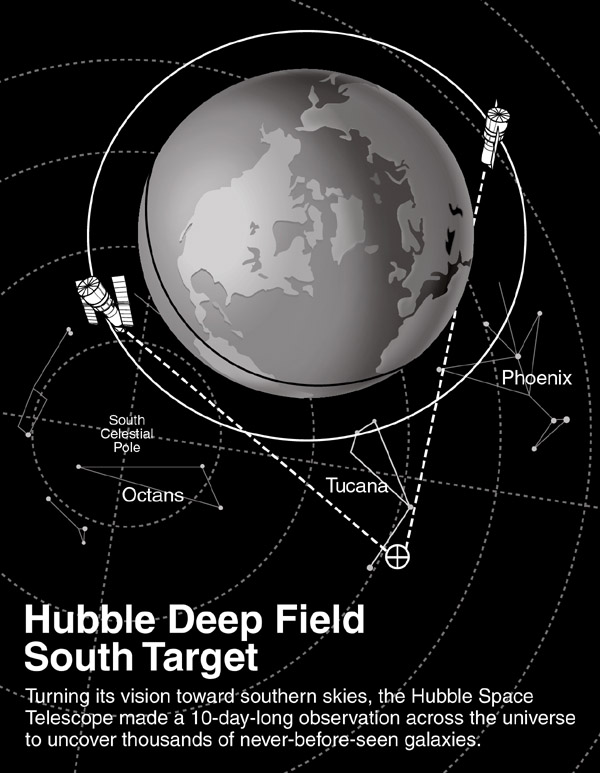

Hubble deep field south target

Turning its vision toward southern skies, the Hubble Space Telescope made a 10-day-long observation across the universe to uncover thousands of never-before-seen galaxies.

Credit: NASA/ESA